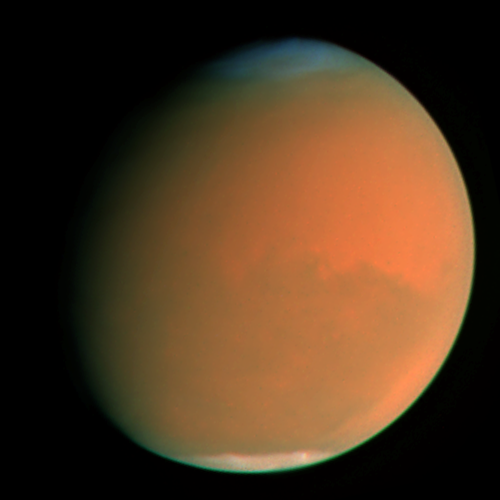

A perfect storm

When Hubble photographed Mars in early September, the storm had already been raging across the planet for nearly two months obscuring all surface features. The fine airborne dust blocks a significant amount of sunlight from reaching the Martian surface. Because the airborne dust is absorbing this sunlight, it heats the upper atmosphere. Seasonal global Mars dust storms have been observed from telescopes for over a century, but this is the biggest storm ever seen in the past several decades.

Credit: NASA/ESA, James Bell (Cornell Univ.), Michael Wolff (Space Science Inst.), and the Hubble Heritage Team (STScI/AURA)